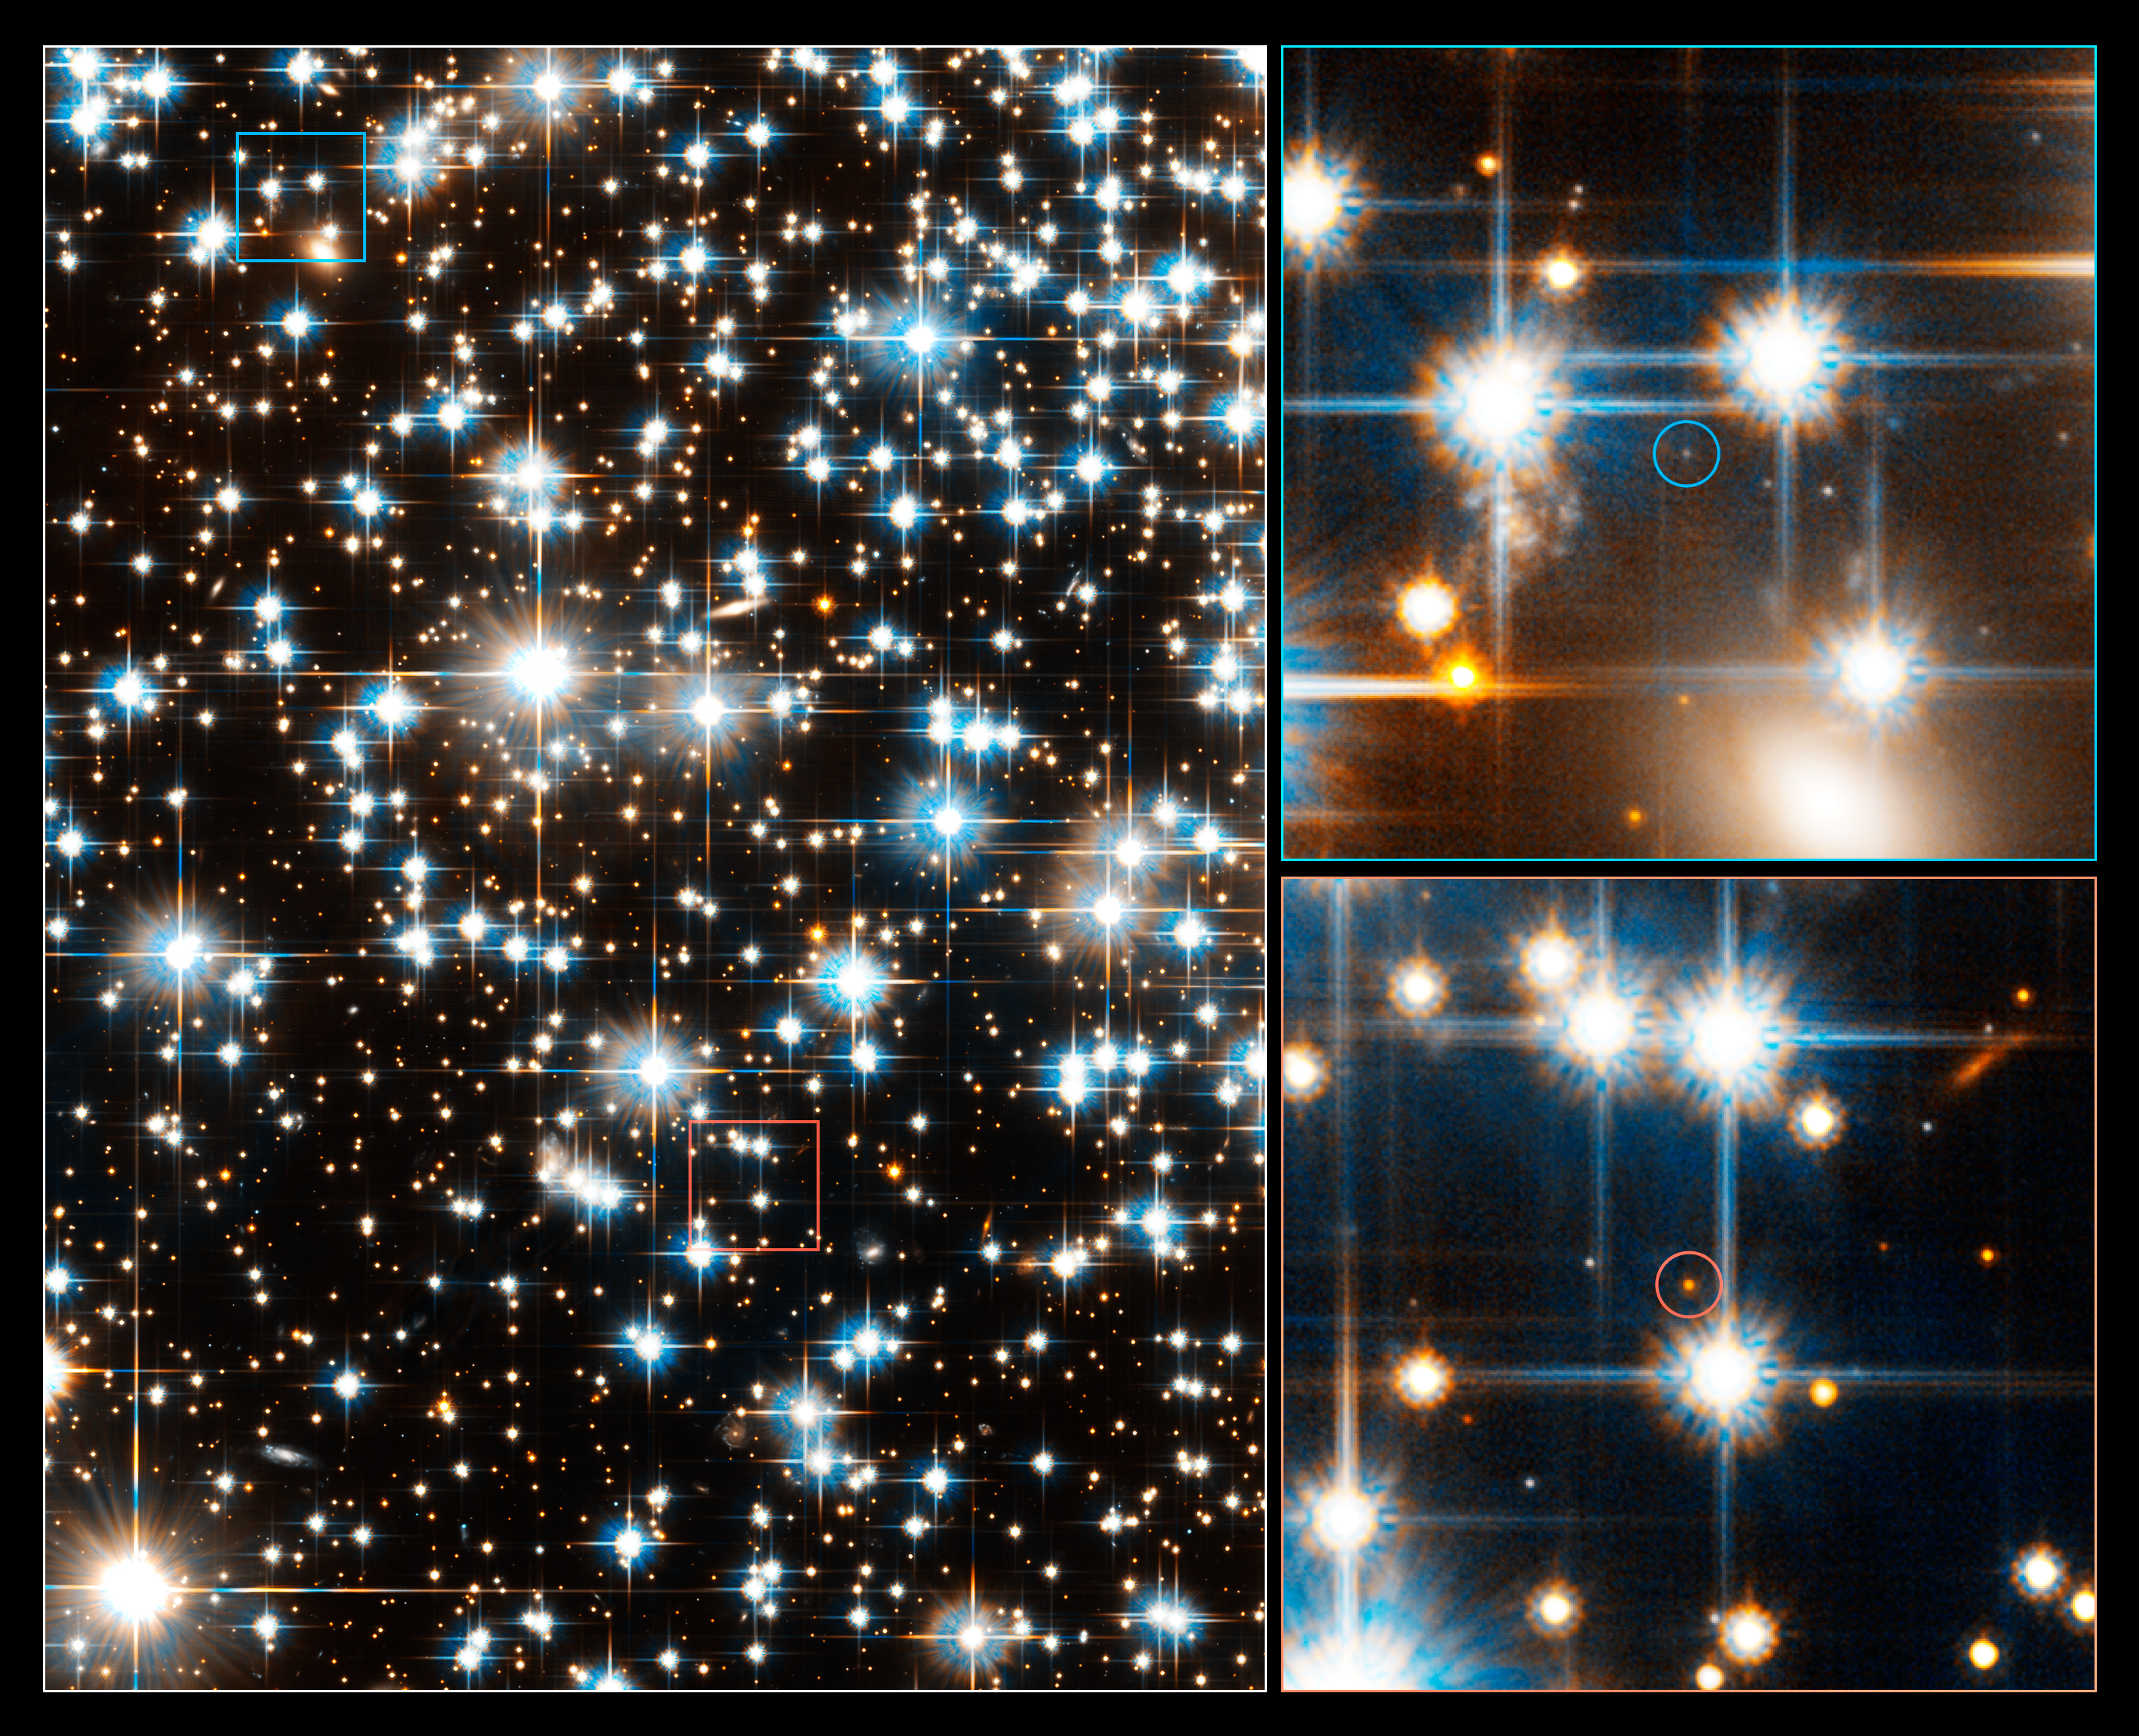

Hubble Takes a Census of the Faintest Stars in an Ancient Star Cluster

Looking like glittering jewels, the stars in this Hubble Space Telescope image at left are part of the ancient globular star cluster NGC 6397. Scattered among these brilliant stars are extremely faint stars. Hubble's Advanced Camera for Surveys has taken a census of the cluster stars, uncovering the faintest stars ever seen in a globular cluster. Globular clusters are spherical concentrations of hundreds of thousands of old stars.

The Advanced Camera found the faintest red dwarf stars (26th magnitude), which are cooler and much lower in mass than our Sun, and the dimmest white dwarfs (28th magnitude), the burned-out relics of normal stars. The light from the dimmest white dwarfs is equal to the light produced by a birthday candle on the Moon as seen from Earth.

The image at lower right shows the faintest red dwarf star (the red dot within the red circle) spied by Hubble.

The image at upper right pinpoints one of the dim white dwarfs (the blue dot within the blue circle) seen by Hubble. The white dwarf has been cooling for billions of years. It is so cool that instead of looking red, it has undergone a chemical change in its atmosphere that makes it appear blue.

The images were taken with visual and red filters. NGC 6397, one of the closest globular clusters to Earth, is 8,500 light-years away in the southern constellation Ara.

The data for these images were obtained in March and April 2005.

Credit: NASA, ESA and H. Richer (University of British Columbia)